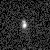

Galaxies: snapshots in time

Single images from the Galaxies: Snapshots in Time collage.

Credit: NASA & ESA